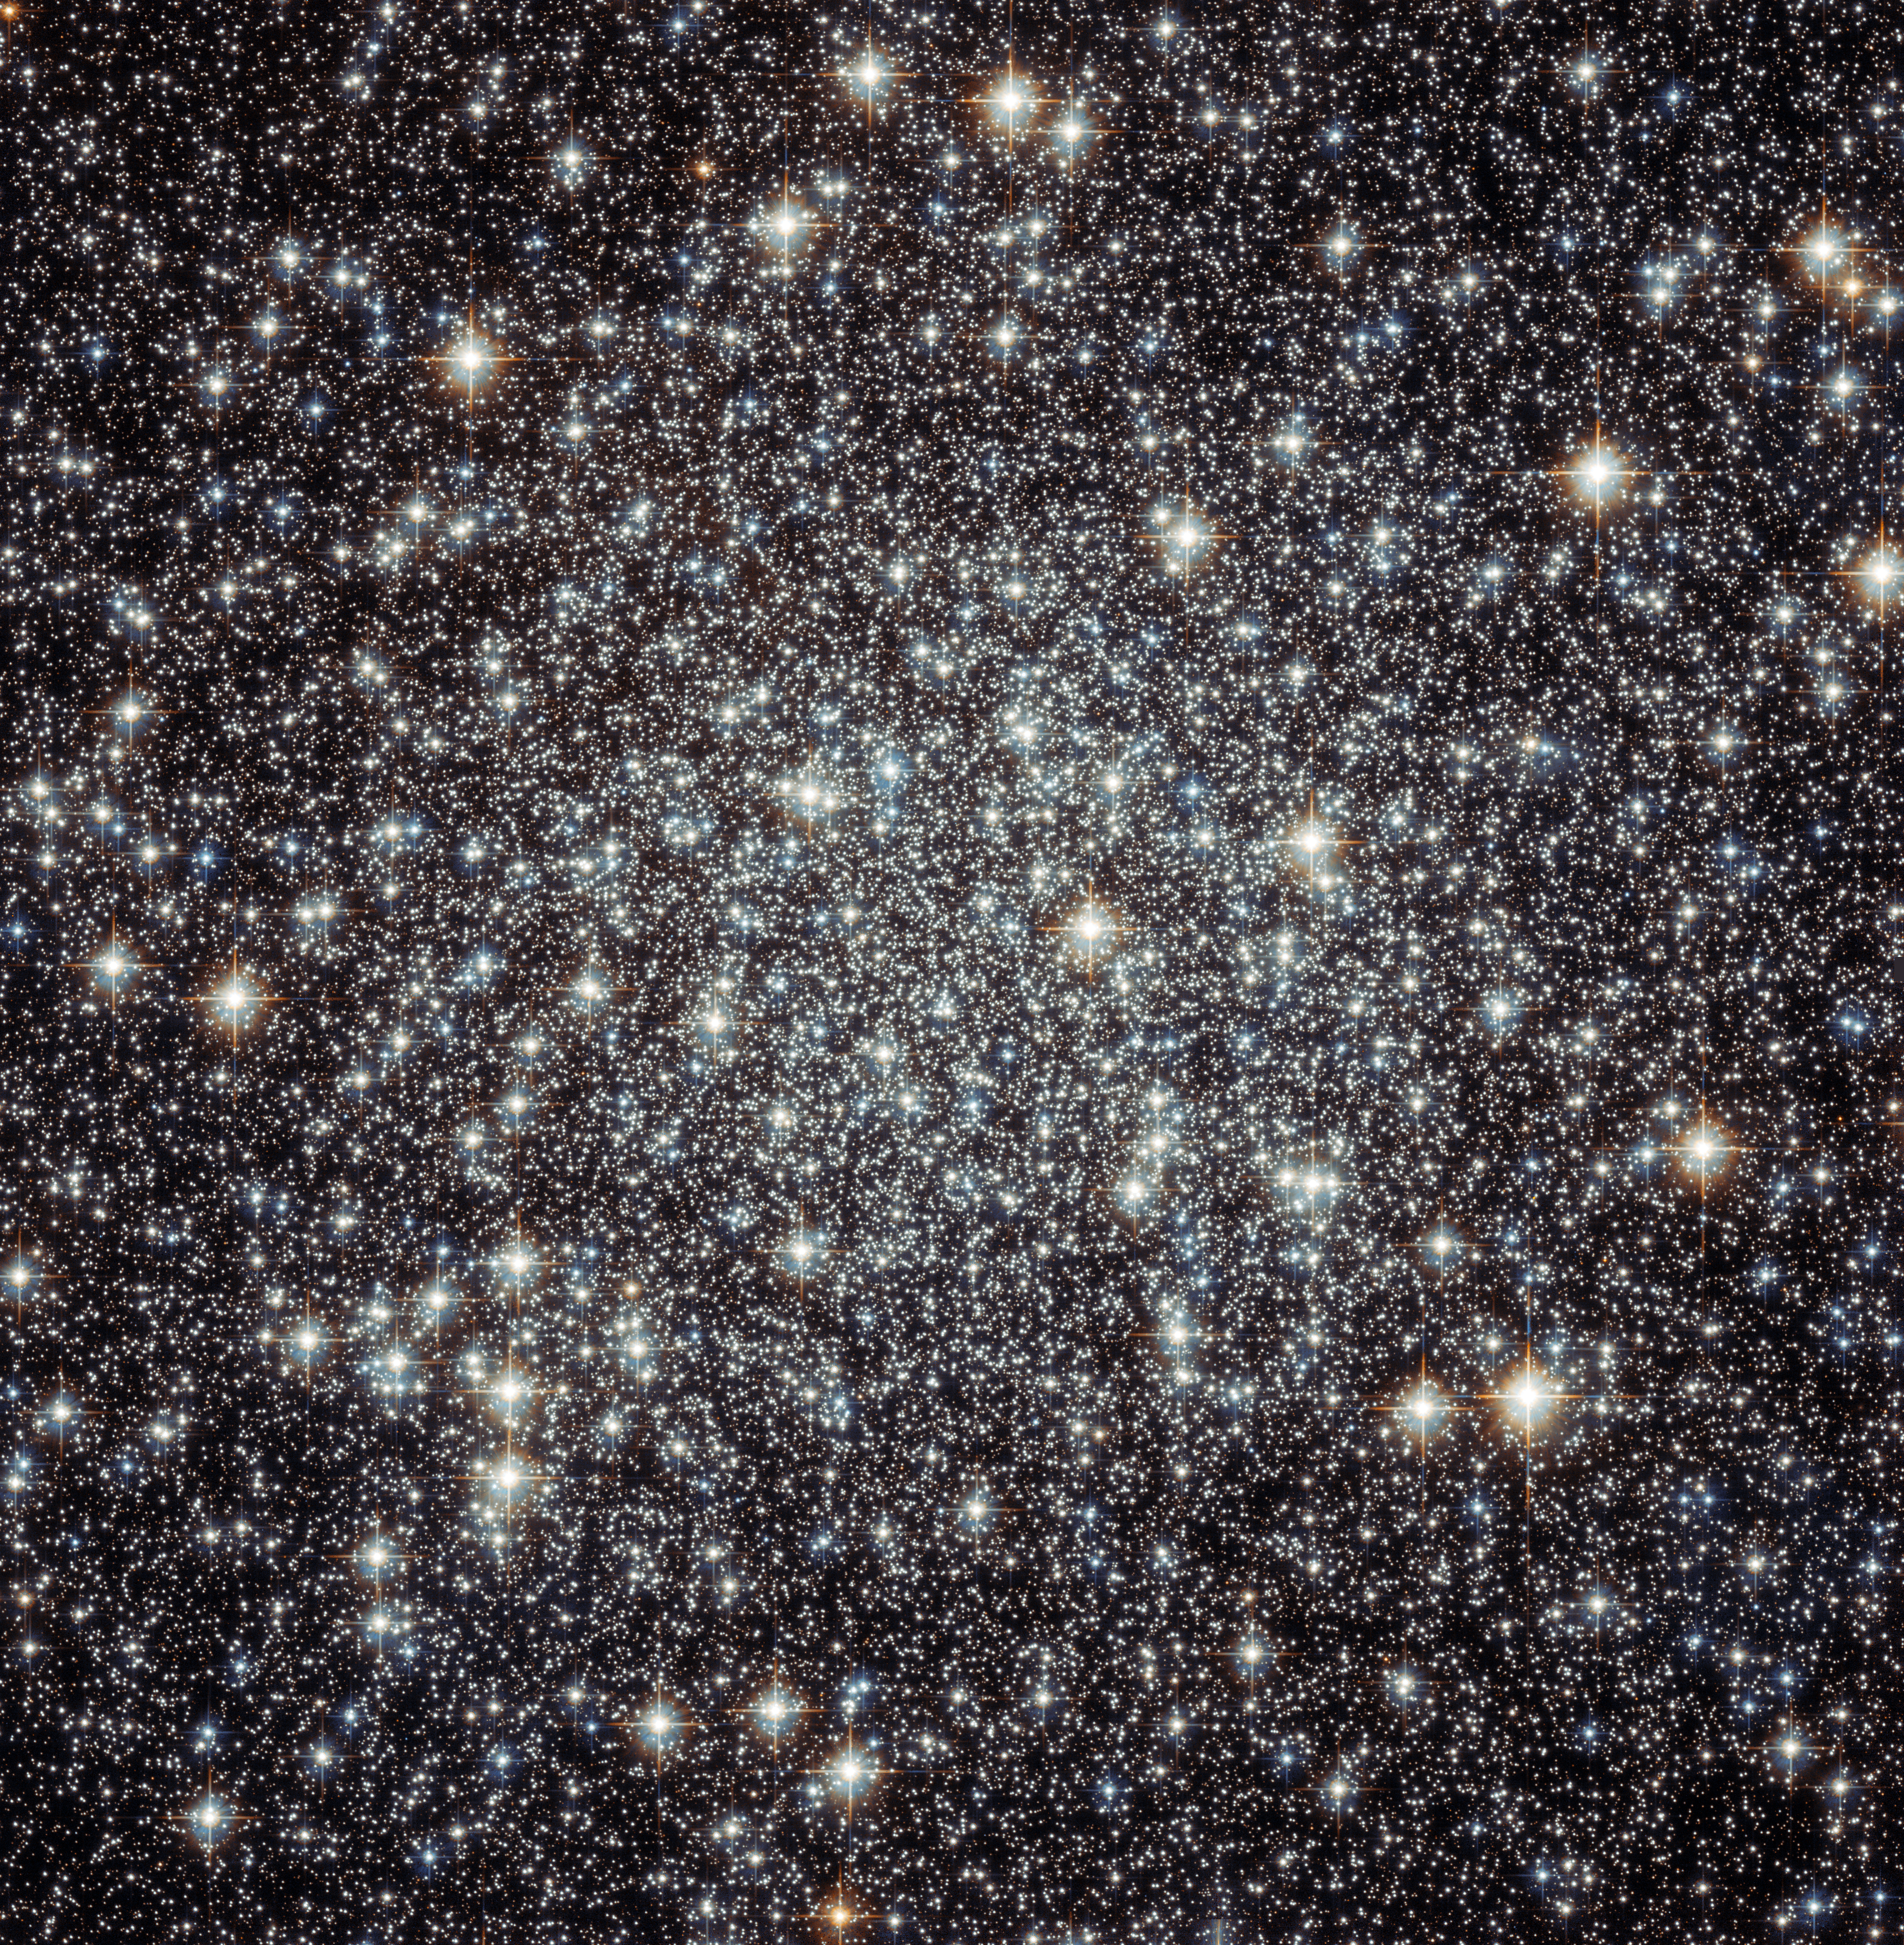

The crammed centre of Messier 22

This image shows the centre of the globular cluster Messier 22, also known as M22, as observed by the NASA/ESA Hubble Space Telescope. Globular clusters are spherical collections of densely packed stars, relics of the early years of the Universe, with ages of typically 12 to 13 billion years. This is very old considering that the Universe is only 13.8 billion years old.

Messier 22 is one of about 150 globular clusters in the Milky Way and at just 10 000 light-years away it is also one of the closest to Earth. It was discovered in 1665 by Abraham Ihle, making it one of the first globulars ever to be discovered. This is not so surprising as it is one of the brightest globular clusters visible from the northern hemisphere, located in the constellation of Sagittarius, close to the Galactic Bulge — the dense mass of stars at the centre of the Milky Way.

The cluster has a diameter of about 70 light-years and, when looking from Earth, appears to take up a patch of sky the size of the full Moon. Despite its relative proximity to us, the light from the stars in the cluster is not as bright as it should be as it is dimmed by dust and gas located between us and the cluster.

As they are leftovers from the early Universe, globular clusters are popular study objects for astronomers. M22 in particular has fascinating additional features: six planet-sized objects that are not orbiting a star have been detected in the cluster, it seems to host two black holes, and the cluster is one of only three ever found to host a planetary nebula — a short-lived gaseous shells ejected by massive stars at the ends of their lives.

Credit: ESA/Hubble & NASA